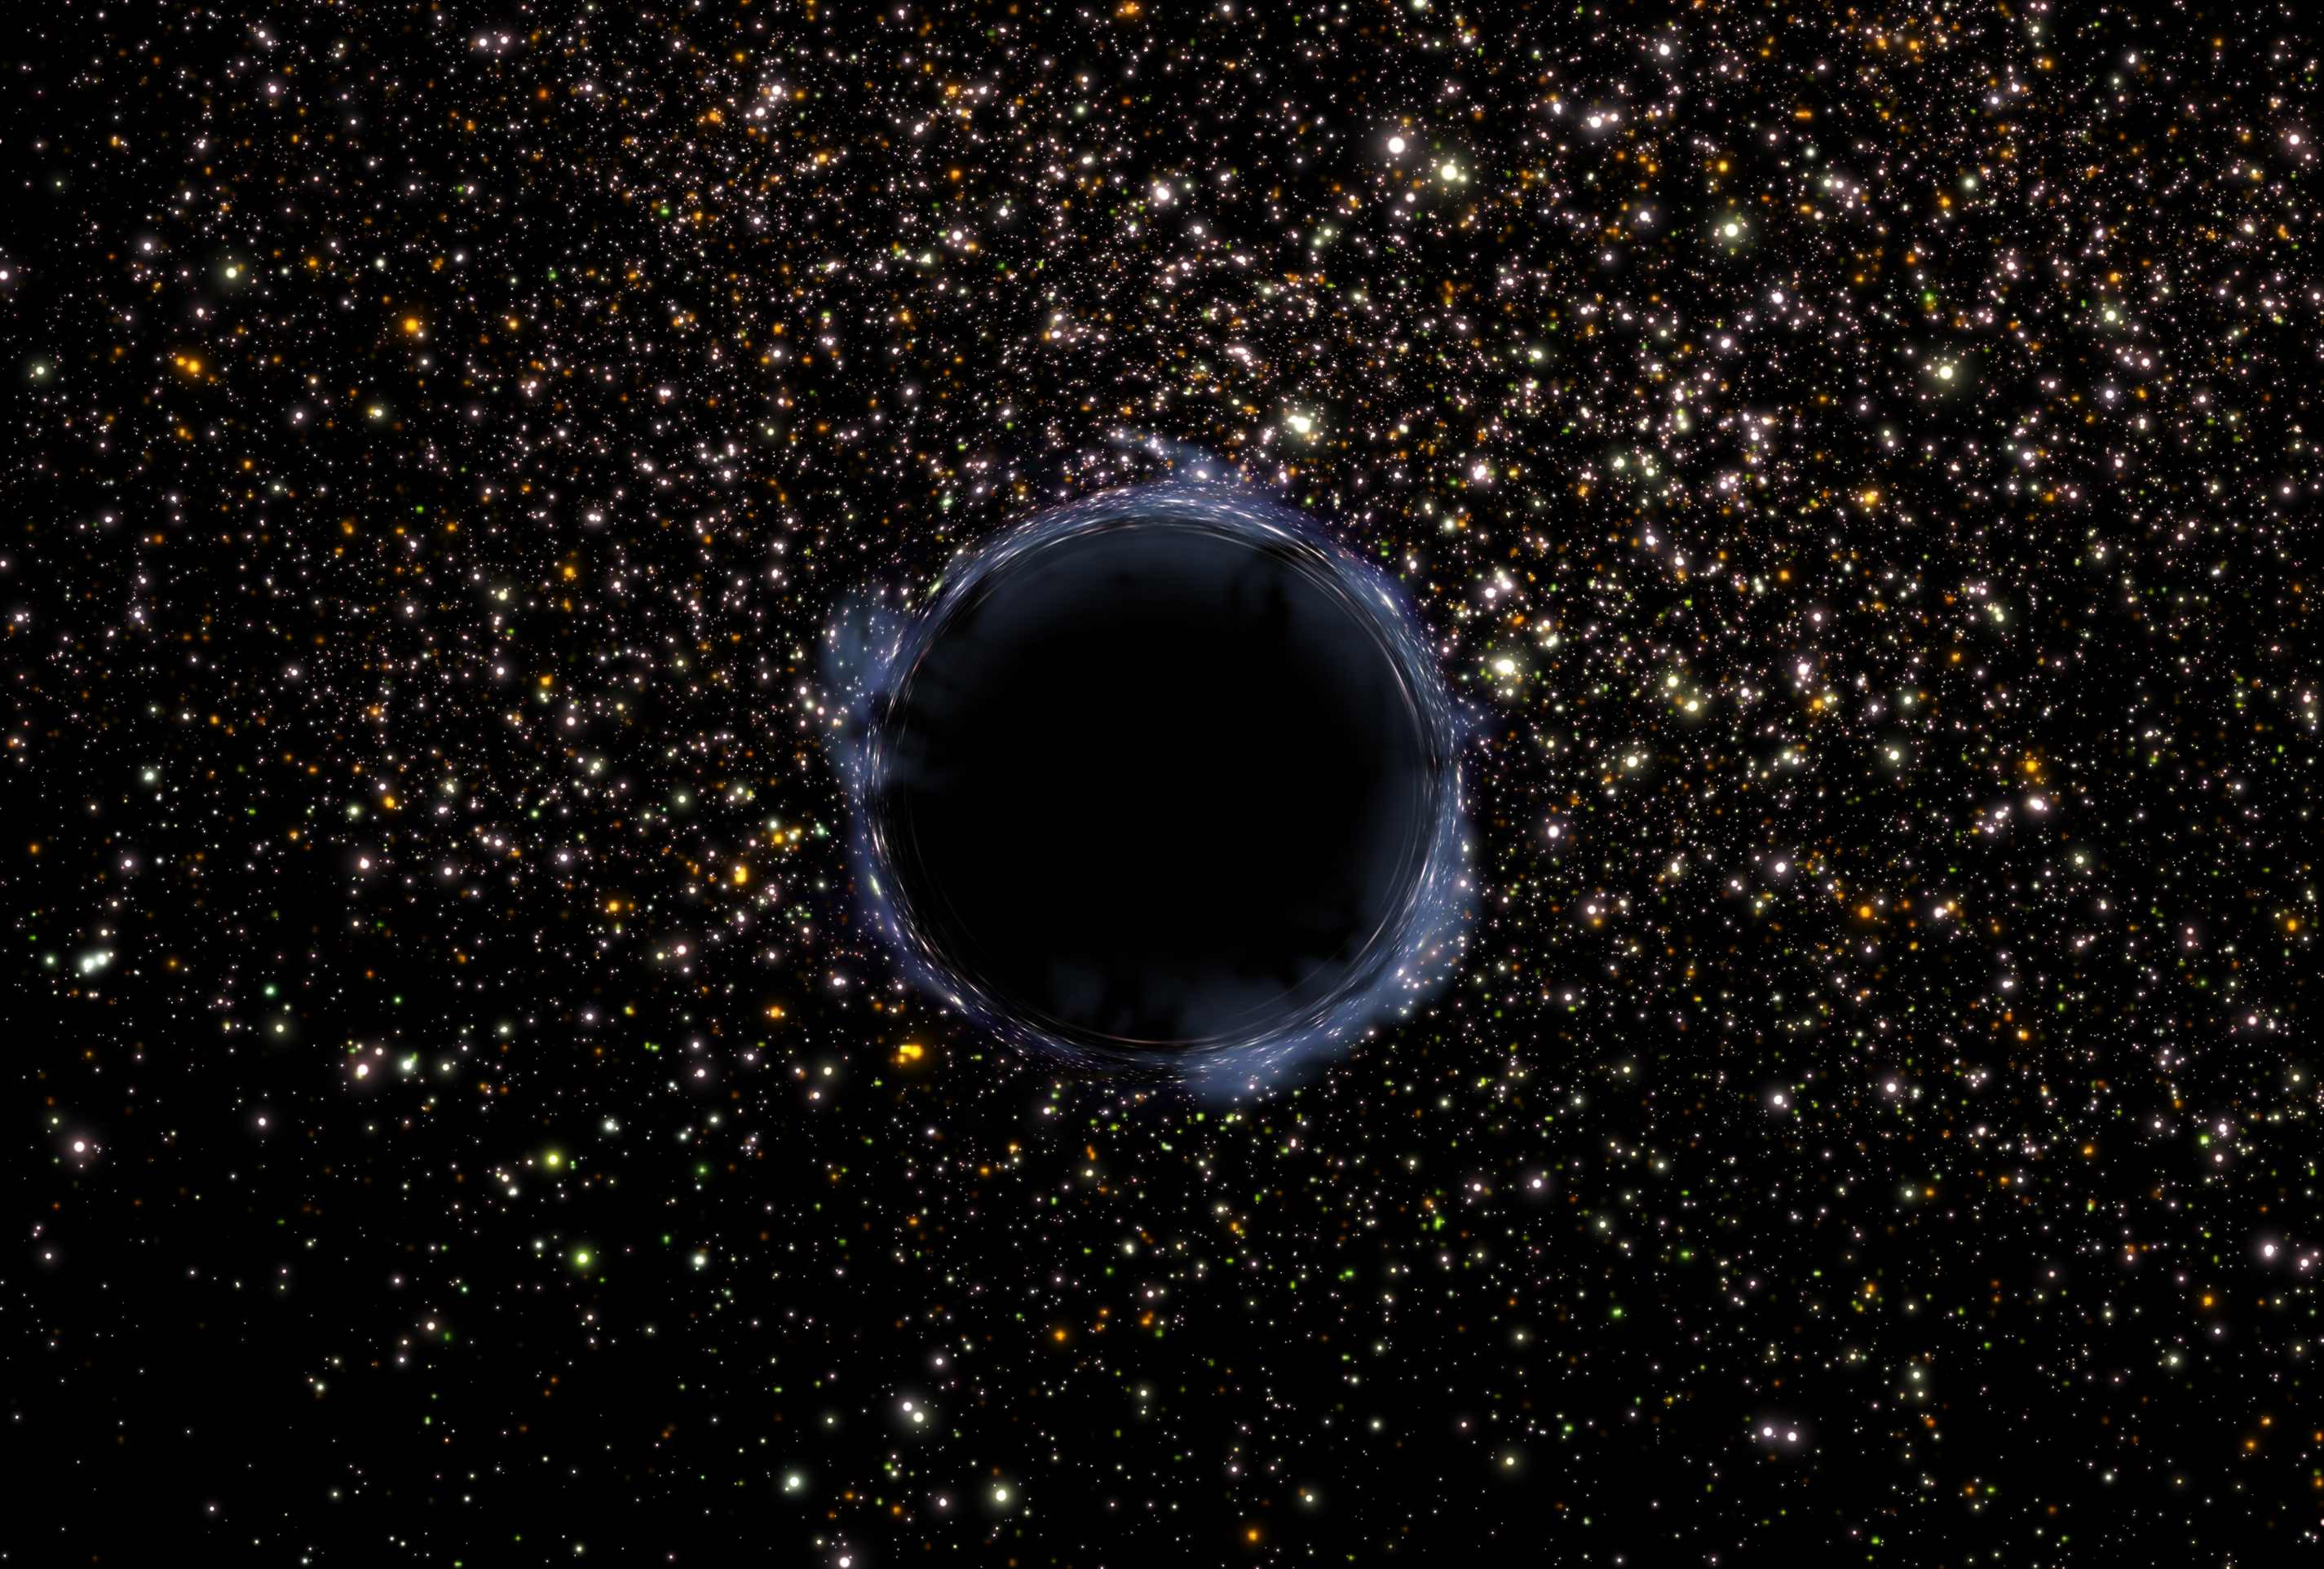

Black Hole in a Star Cluster (Artist's Impression)

Hubble discovers Black Holes in unexpected places.

Credit: NASA/ESA and G. Bacon (STScI)